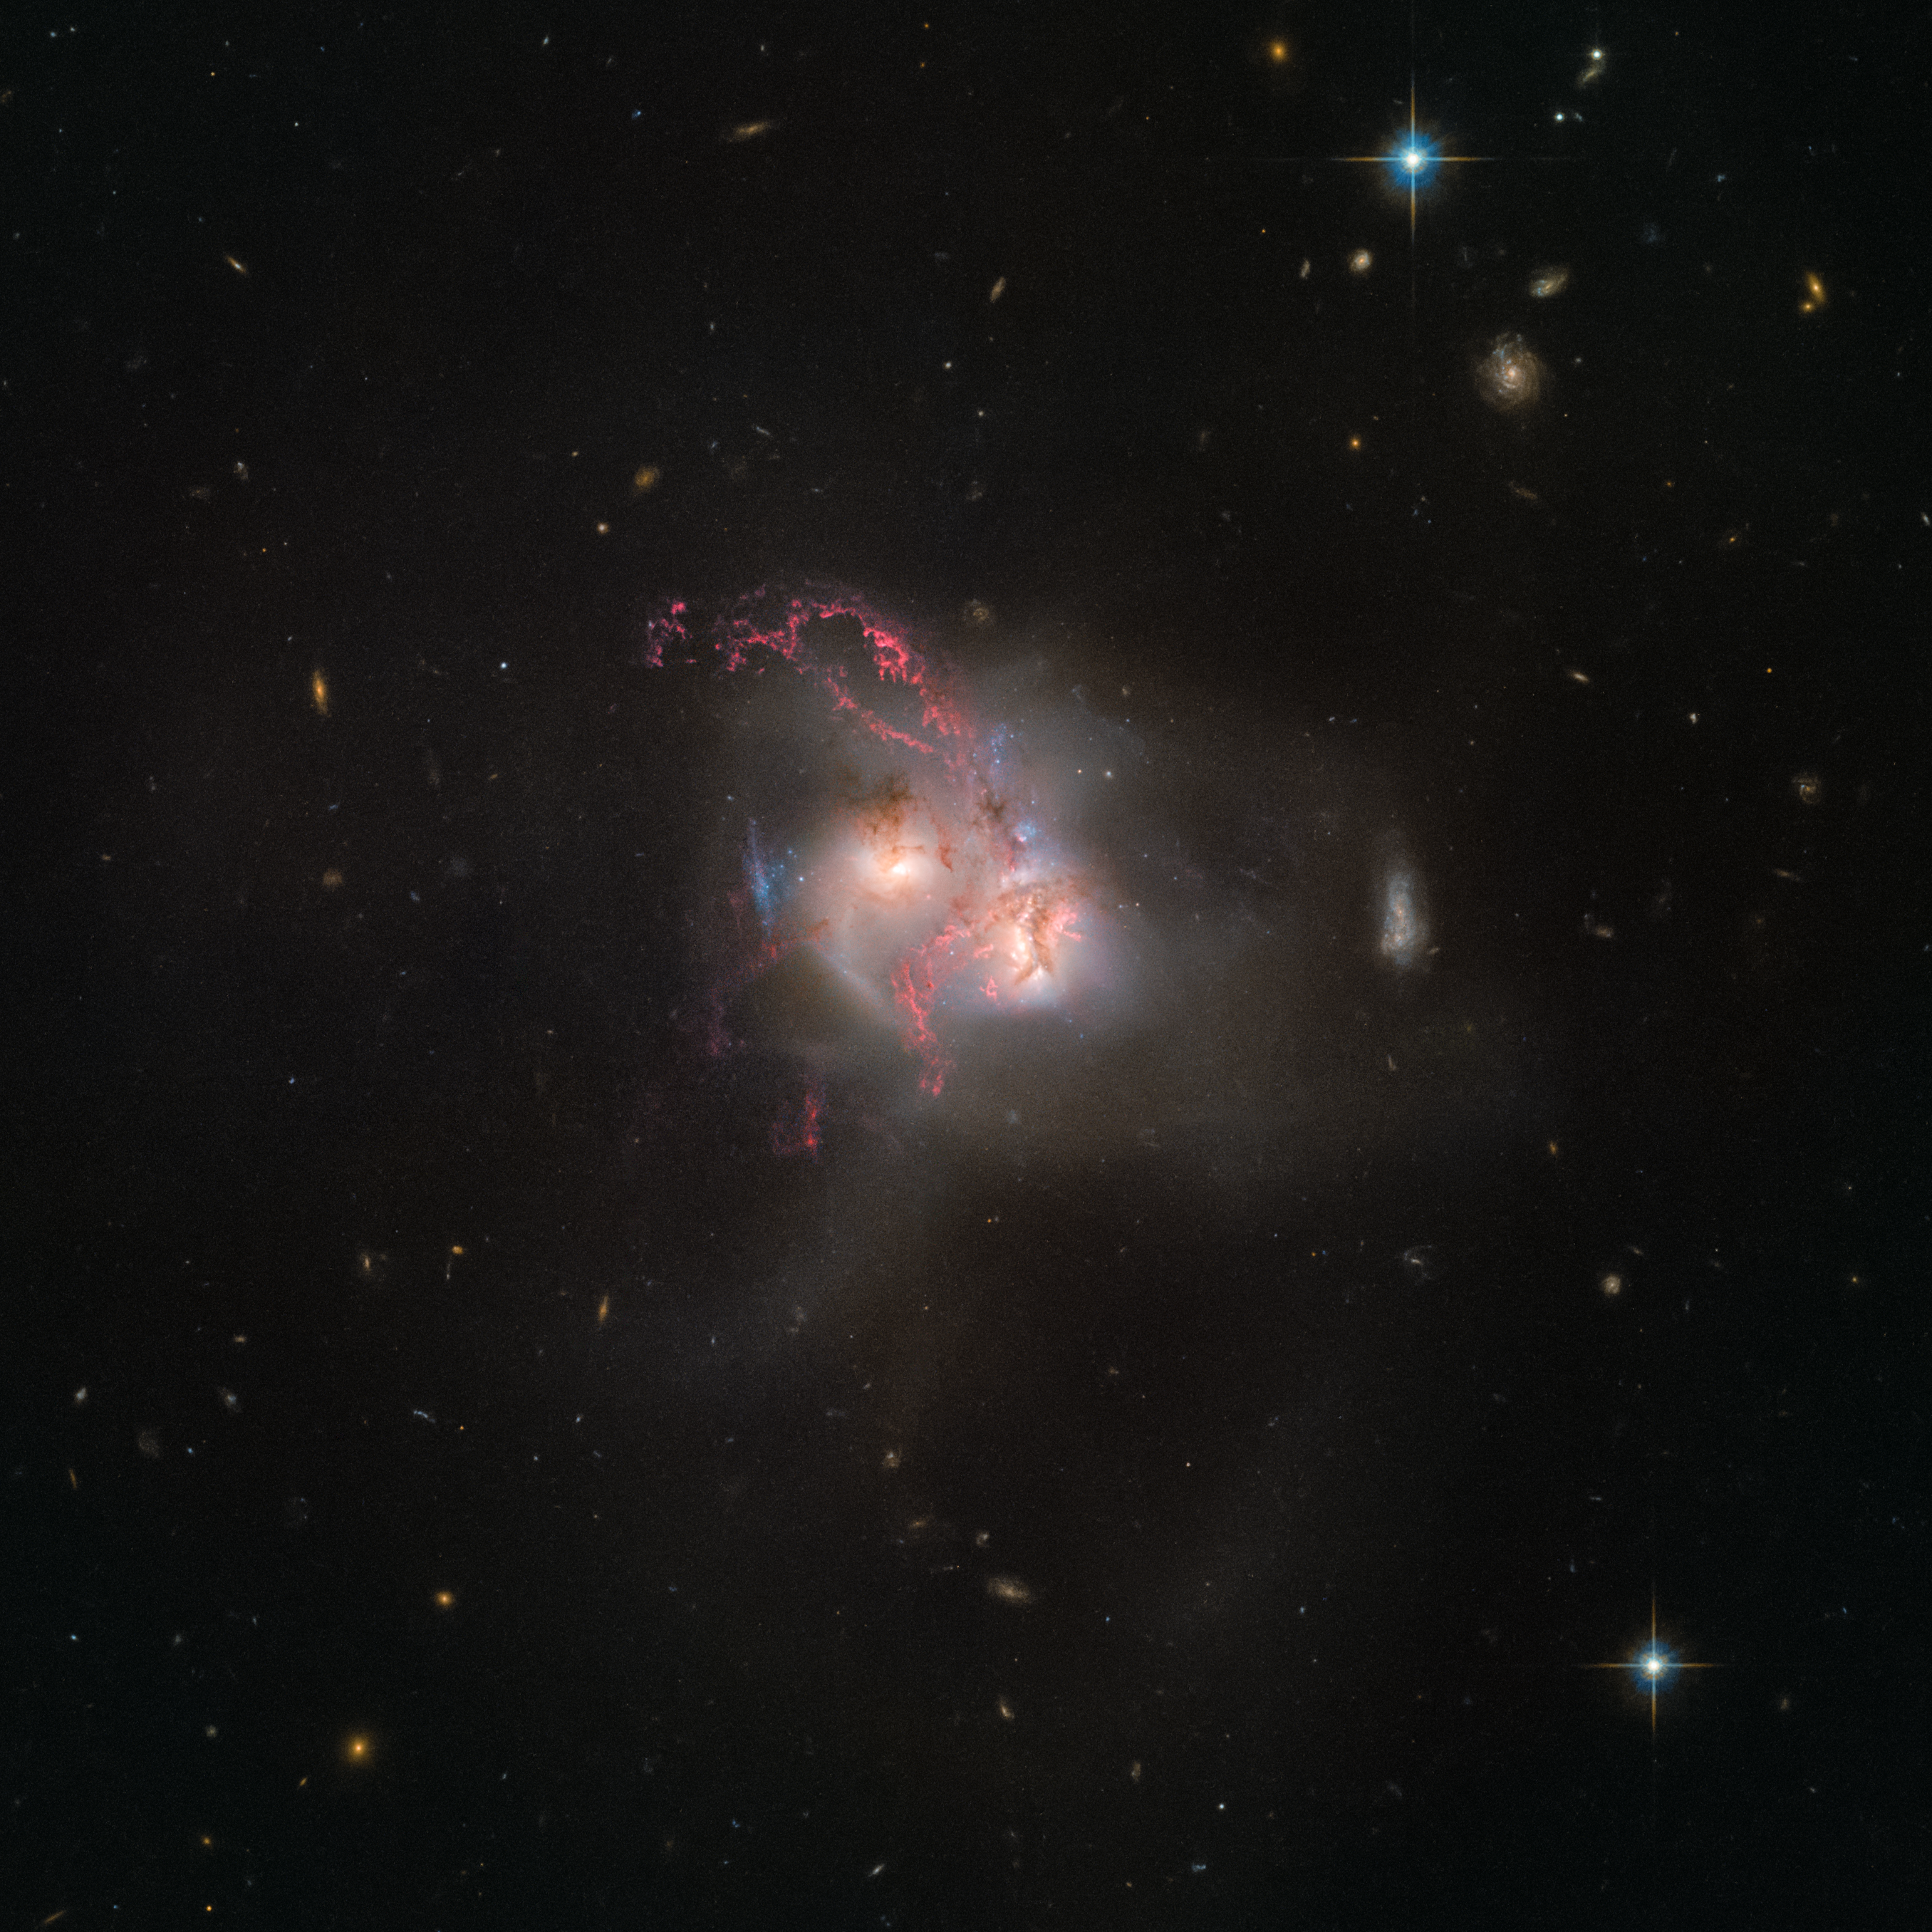

An ongoing cosmic collision

NGC 5256 is a pair of galaxies in its final stage of merging. It was previously observed by Hubble as part of a collection of 59 images of merging galaxies, released on Hubble’s 18th anniversary on 24 April 2008. The new data make the gas and dust being whirled around inside and outside the galaxy more visible than ever before.

This image is composed of data gathered with the Advanced Camera for Surveys and the Wide-Field Camera 3.

Credit: ESA/Hubble, NASA